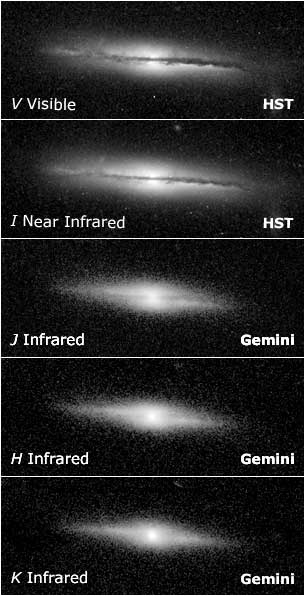

Image Comparison Using Different Filters

Comparison of images using different optical (HST/ACS) and IR (Gemini) filters.

Credit: NASA/ESA, Gemini Observatory and W. Keel (University of Alabama, Tuscaloosa)